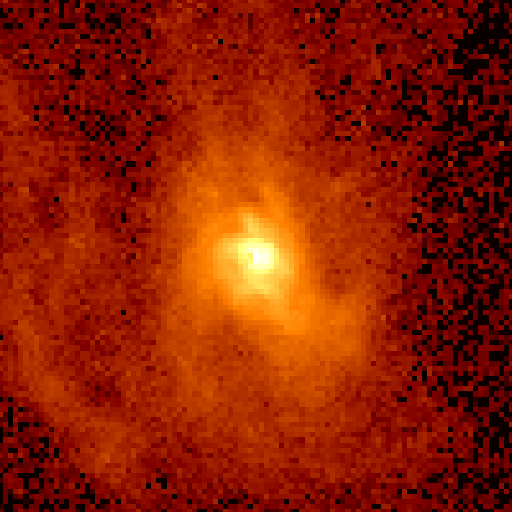

Hubble measures velocity of gas orbiting black hole

Astronomers using NASA's Hubble Space Telescope have found seemingly conclusive evidence for a massive black hole in the center of the giant elliptical galaxy M87, located 50 million light years away in the constellation Virgo. Earlier observations suggested the black hole was present, but were not decisive.

Credit: Holland Ford, Space Telescope Science Institute/Johns Hopkins University; Richard Harms, Applied Research Corp.; Zlatan Tsvetanov, Arthur Davidsen, and Gerard Kriss at Johns Hopkins; Ralph Bohlin and GeorgeHartig at Space Telescope Science Institute; Linda Dressel and Ajay K.Kochhar at Applied Research Corp. in Landover, Md.; and Bruce Margon fromthe University of Washington in Seattle NASA/ESA